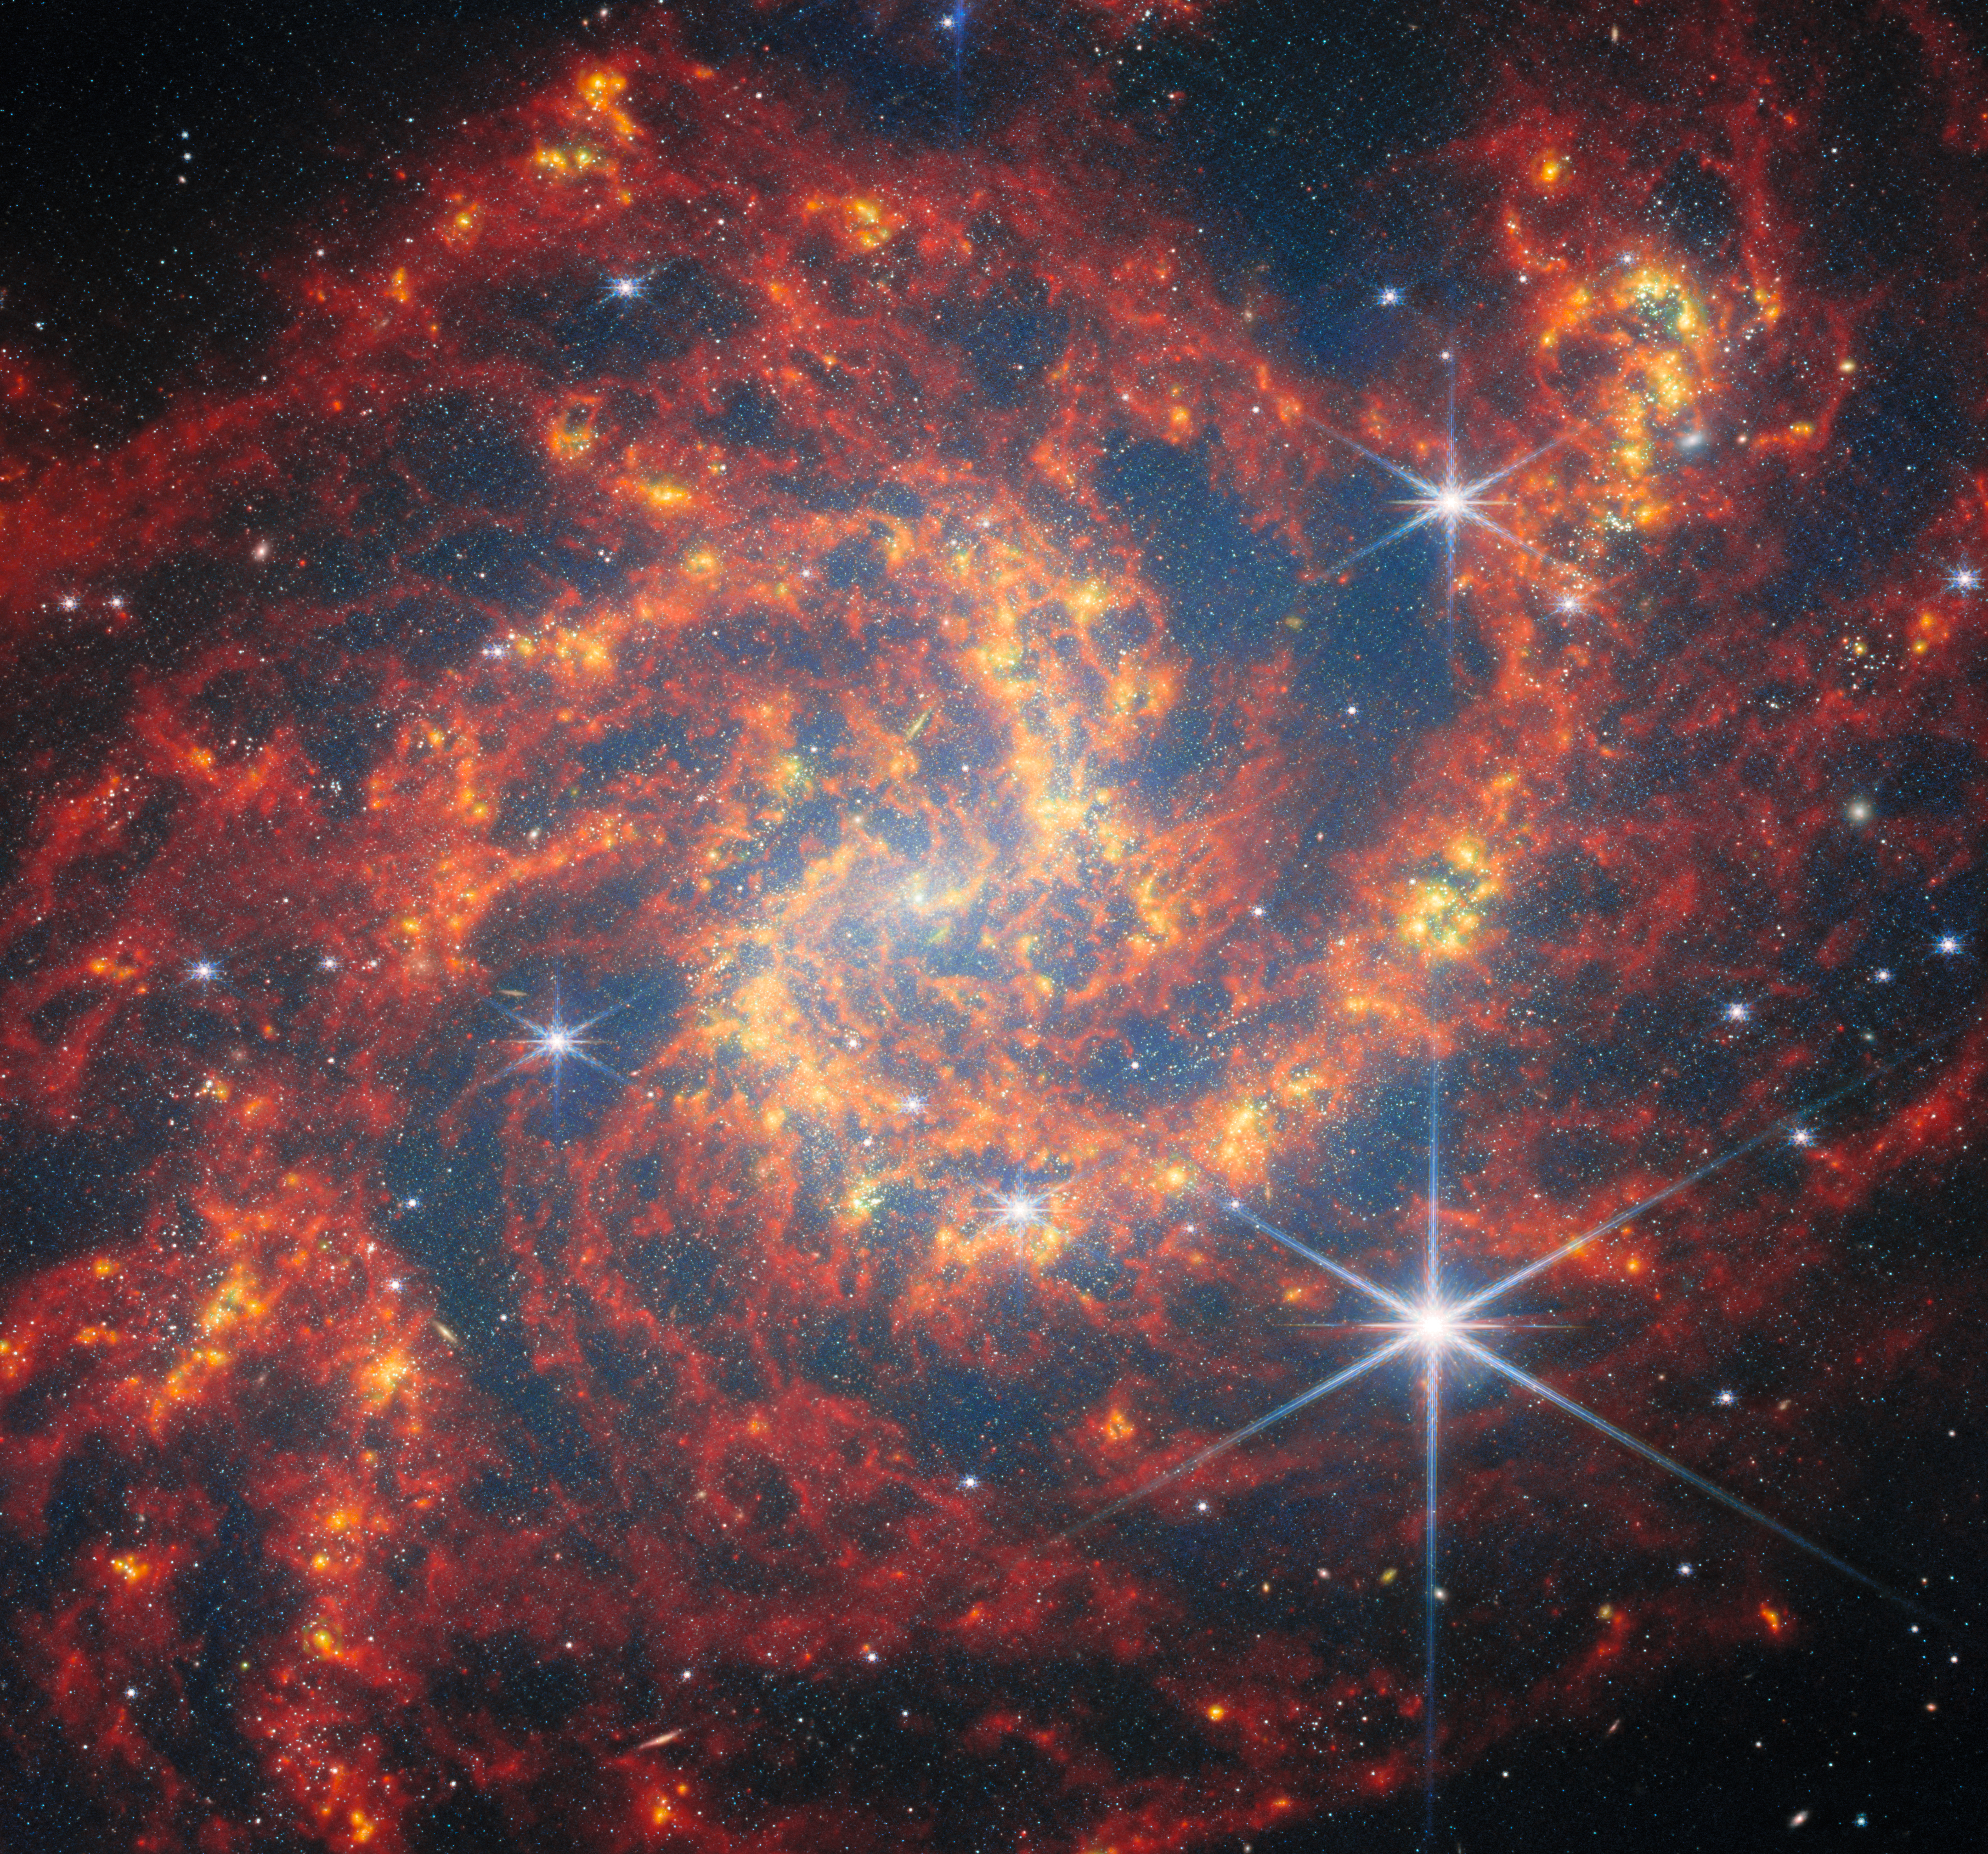

Webb visits a star-forming spiral

The target of today’s NASA/ESA/CSA James Webb Space Telescope Picture of the Month is the spiral galaxy NGC 2283. This galaxy resides roughly 45 million light-years away in the constellation Canis Major. Classified as a barred spiral galaxy, NGC 2283’s central bar of stars is encircled by loosely wound spiral arms.

This new image shows NGC 2283 through the eyes of Webb’s Near-InfraRed Camera (NIRCam) and Mid-InfraRed Instrument (MIRI). Webb gazed at NGC 2283 for a combined 17 minutes to collect the data for this image, which is constructed from six snapshots taken with different near- and mid-infrared filters. These filters reveal the emission from NGC 2283’s sparkling stellar population, as well as the light from clouds of hydrogen gas that have been heated by young stars. Sooty molecules called polycyclic aromatic hydrocarbons, of great interest to astronomers, emit light that’s mapped by two of the filters used here. The large, bright stars with prominent diffraction spikes on display in this image are inhabitants of our own galaxy, which lie between us and NGC 2283.

The new Webb images of NGC 2283 were collected as part of an observing programme (#3707) dedicated to understanding the connections between stars, gas and dust in nearby star-forming galaxies. NGC 2283 is just one of the 55 galaxies in the local Universe examined by Webb for this programme. All of the galaxies surveyed in this programme are massive star-forming galaxies close enough for individual star clusters and gas clouds to be visible.

These star clusters and gas clouds are on full display, outlining the galaxy’s graceful spiral arms. The dense knots of gas illuminated by young stars are evidence for active star formation that is turning cold hydrogen gas into blazing stars in NGC 2283.

Galaxies with active star formation often play host to spectacular stellar explosions called core-collapse supernovae. Just over two years ago, on 28 January 2023, a supernova named SN 2023AXU was discovered in NGC 2283. SN 2023AXU is what’s known as a Type II supernova — the collapse of the core of a star at least eight times as massive as the Sun and subsequent rebounding and explosion of the star’s outer layers.

While the process of star formation converts gas into new stars, supernovae complete the cycle. The explosion of a supernova can fling gas across hundreds of light-years, enriching the star-forming clouds of the interstellar medium with elements like oxygen and sodium. Over time, the supernova-enriched gas is incorporated into new generations of stars, continuing the life cycle of gas and stars in galaxies across the Universe.

Credit: ESA/Webb, NASA & CSA, A. Leroy